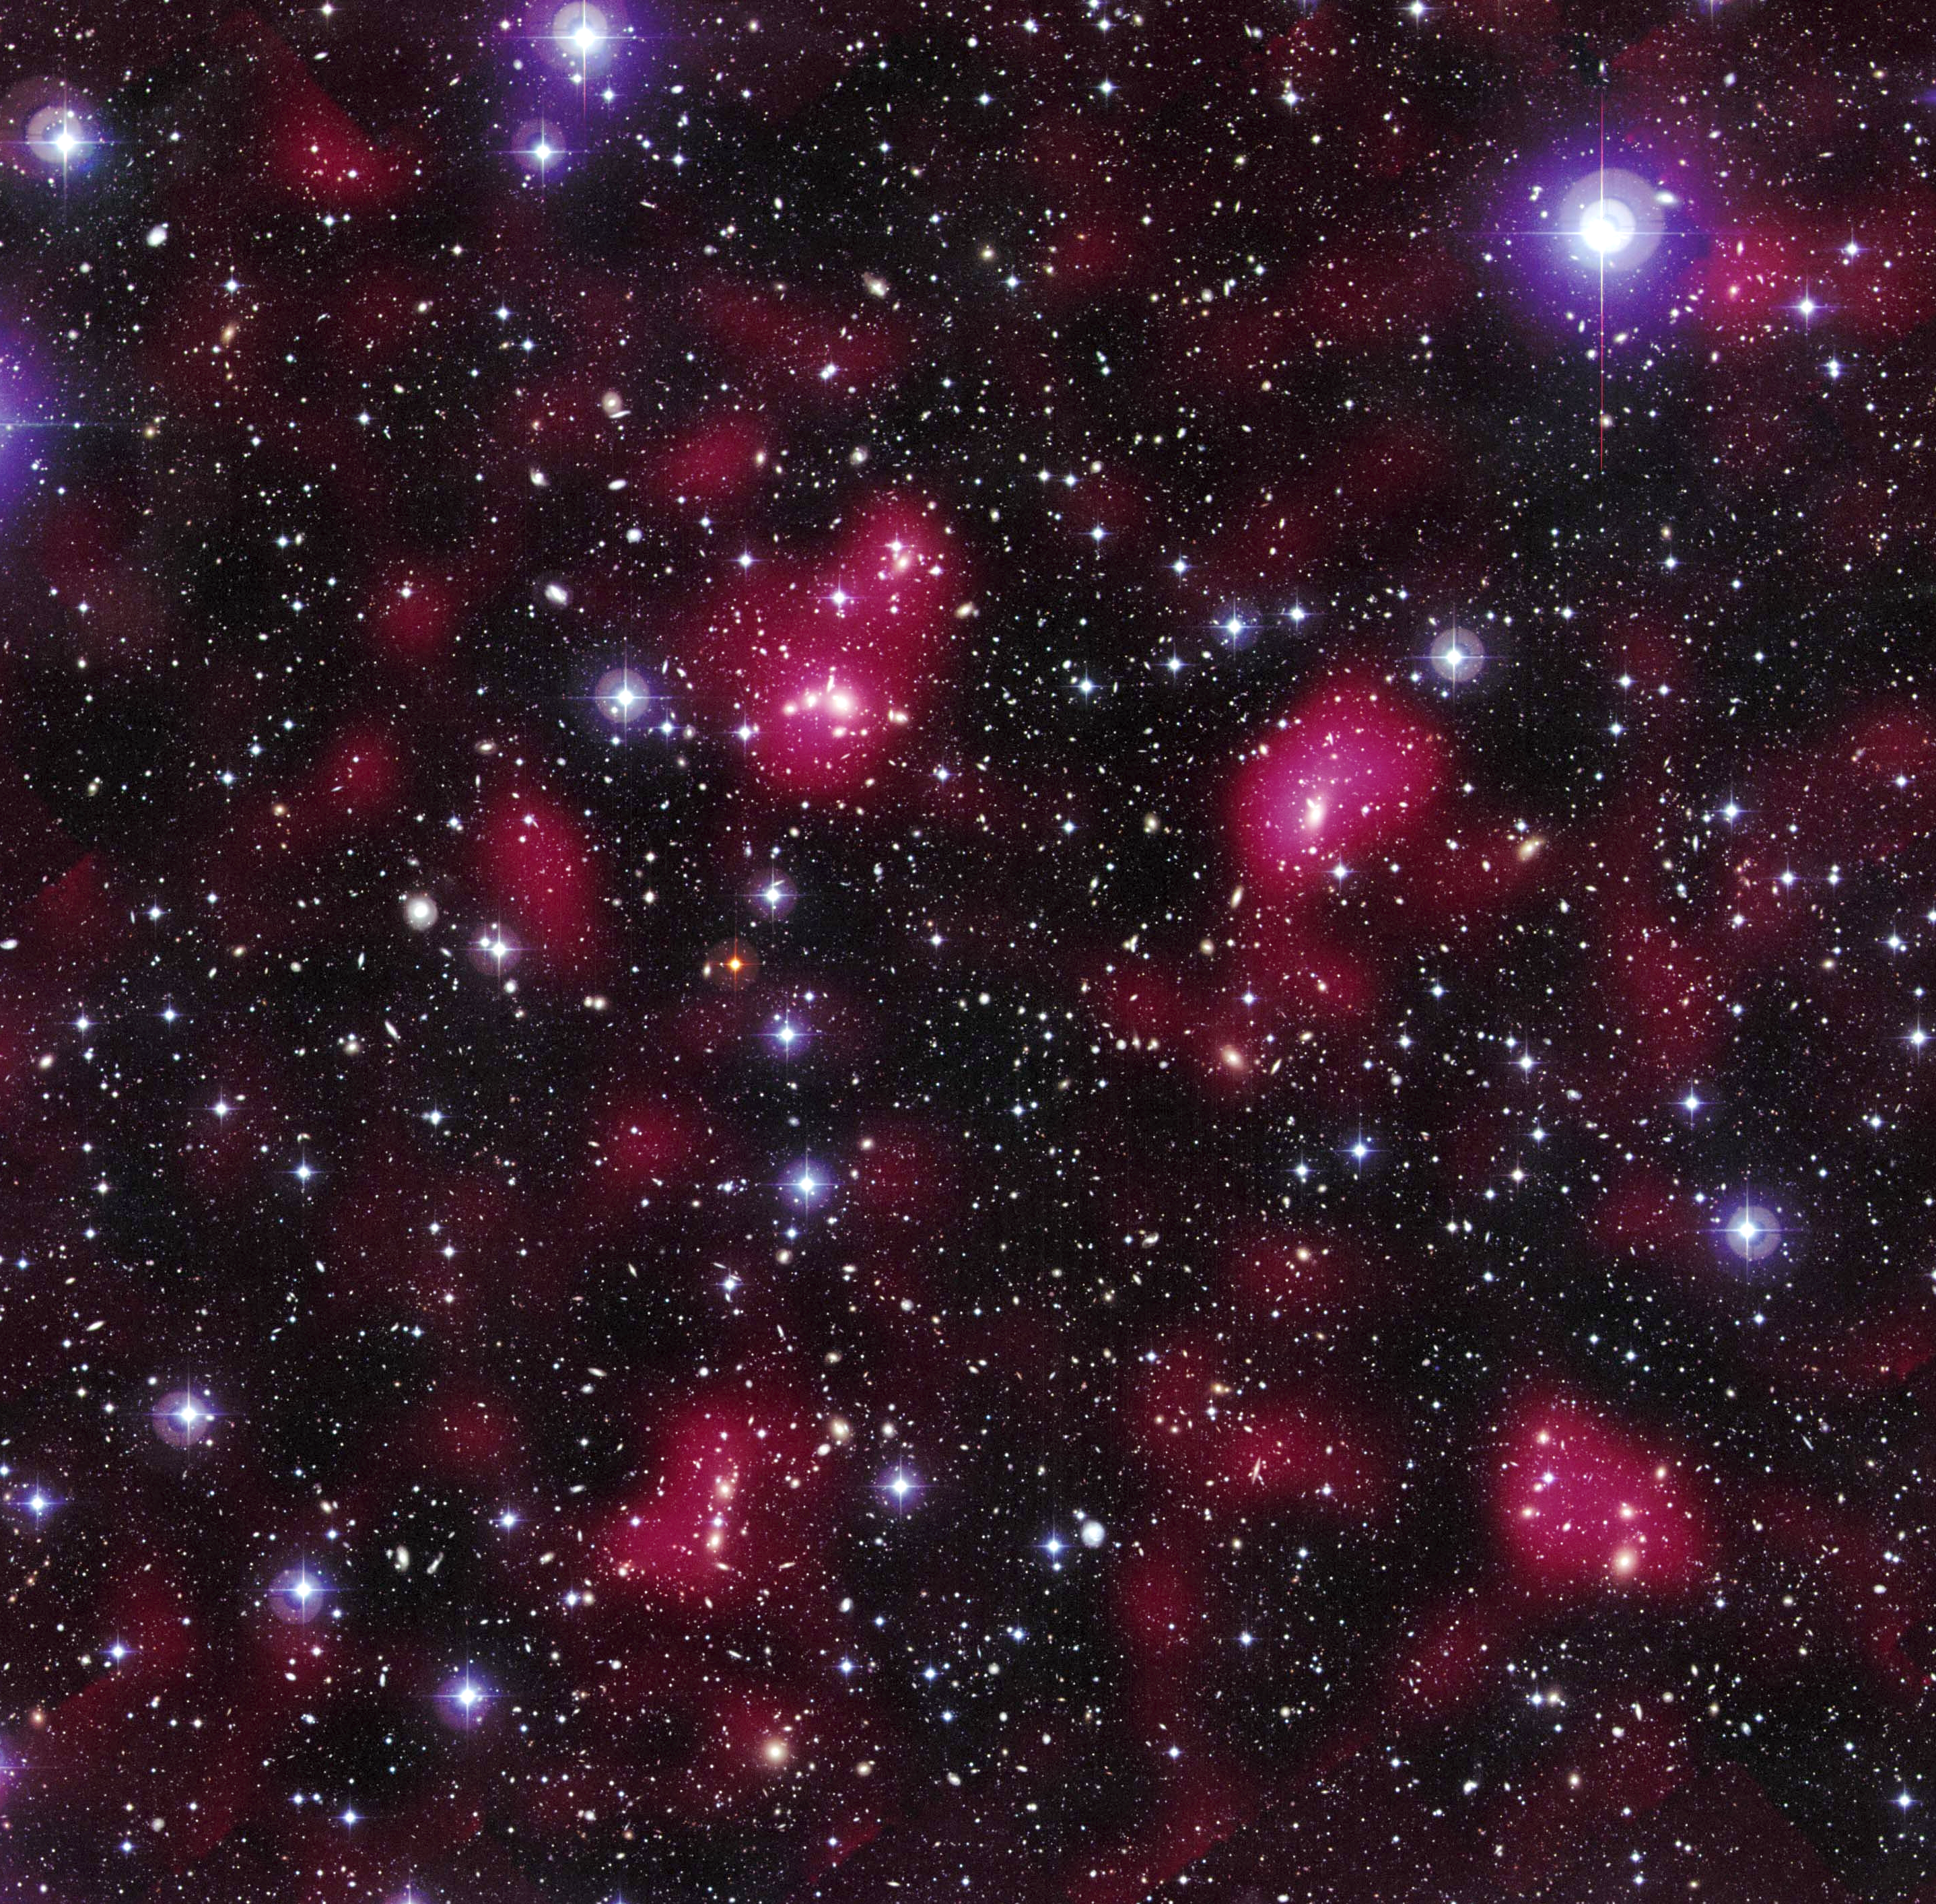

Hubble maps dark matter web in a large galaxy cluster

This image reveals the distribution of dark matter in the supercluster Abell 901/902, composed of hundreds of galaxies.

The image shows the entire supercluster. Astronomers assembled this photo by combining a visible-light image of the supercluster taken with the MPG/ESO 2.2-meter telescope in La Silla, Chile, with a dark matter map derived from observations with the NASA/ESA Hubble Space Telescope.

The magenta-tinted clumps represent a map of the dark matter in the cluster. Dark matter is an invisible form of matter that accounts for most of the universe's mass. The image shows that the supercluster galaxies lie within the clumps of dark matter.

Hubble cannot see the dark matter directly. Astronomers inferred its location by analysing the effect of so-called weak gravitational lensing, where light from more than 60,000 galaxies behind Abell 901/902 is distorted by intervening matter within the cluster. Researchers used the observed, subtle distortion of the galaxies' shapes to reconstruct the dark matter distribution in the supercluster.

The image was assembled by combining a visible-light image of the supercluster with a map of the dark matter distribution.

The image is part of the Space Telescope Abell 901/902 Galaxy Evolution Survey (STAGES), which covers one of the largest patches of sky ever observed by the Hubble telescope. The area surveyed is so wide that it took 80 Hubble images to cover the entire field.

Hubble's Advanced Camera for Surveys made the observations in June and July 2005 and in January 2006.

Credit for the Hubble images: NASA, ESA, C. Heymans (University of British Columbia, Vancouver), M. Gray (University of Nottingham, U.K.), M. Barden (Innsbruck), and the STAGES collaboration
Credit for the ground-based image: ESO, C. Wolf (Oxford University, U.K.), K. Meisenheimer (Max-Planck Institute for Astronomy, Heidelberg), and the COMBO-17 collaboration